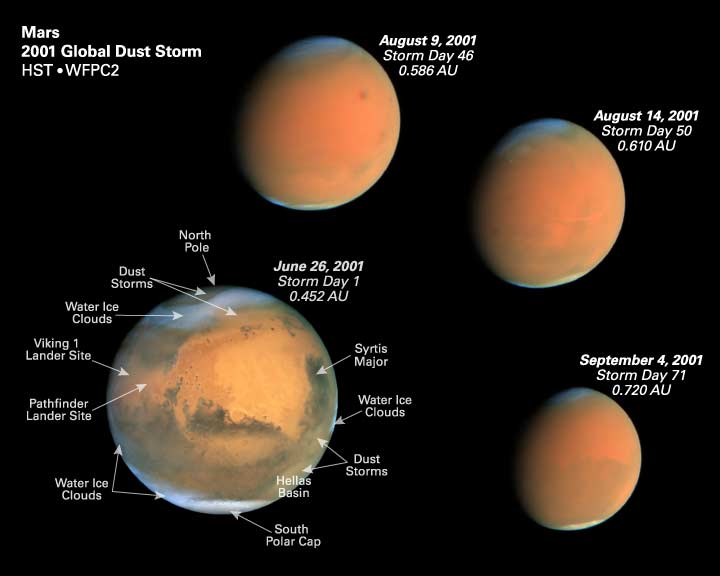

Four epochs of the global dust storm with Martian features identified

A pair of eagle-eyed spacecraft - the NASA Mars Global Surveyor (MGS) and NASA/ESA Hubble Space Telescope - are giving amazed astronomers a ringside seat to the biggest global dust storm seen on Mars in several decades. The Martian dust storm, larger by far than any seen on Earth, has raised a cloud of dust that has engulfed the entire planet for several months.

This image shows four epochs of the global dust storm, with Martian features identified.

Credit: Zolt Levay (STScI)